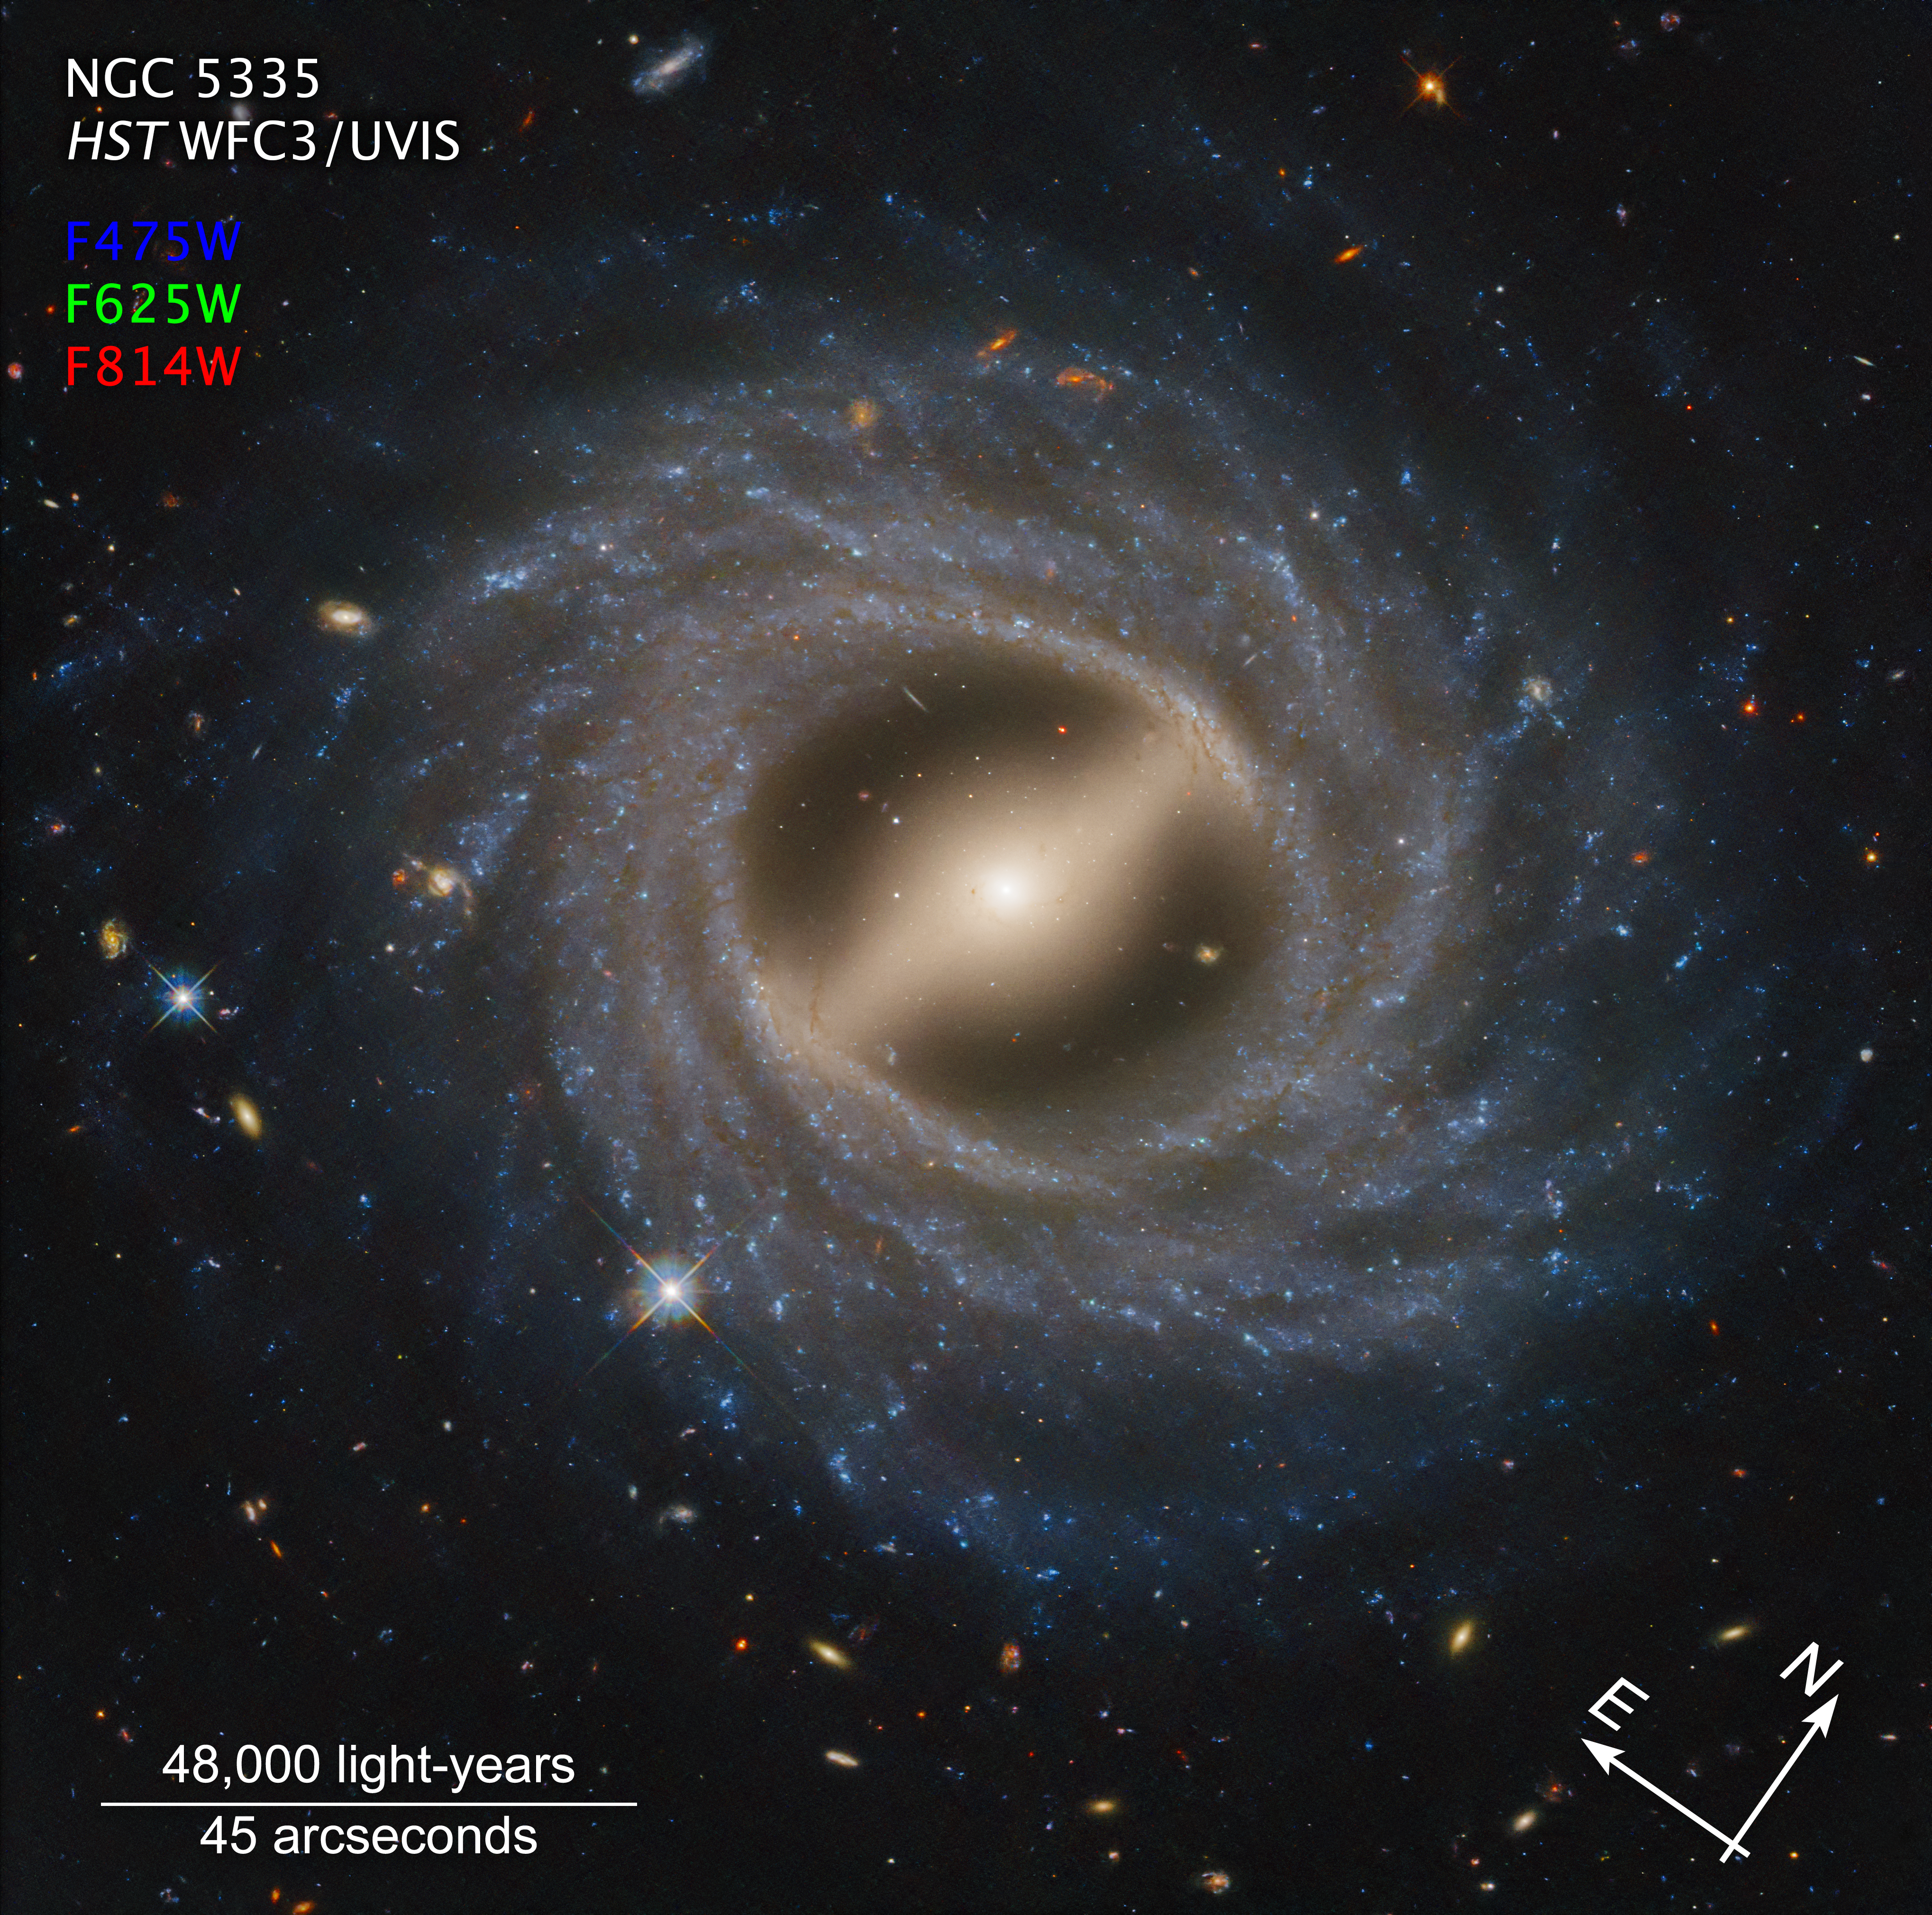

Barred Spiral Galaxy NGC 5335 (annotated)

The Hubble Space Telescope captured in exquisite detail a face-on view of a remarkable-looking galaxy. NGC 5335 is categorized as a flocculent spiral galaxy with patchy streamers of star formation across its disk. There is a striking lack of well-defined spiral arms that are commonly found among galaxies, including our Milky Way. A notable bar structure slices across the center of the galaxy. The bar channels gas inwards toward the galactic center, fueling star formation. Such bars are dynamic in galaxies and may come and go over two-billion-year intervals. They appear in about 30 percent of observed galaxies, including our Milky Way.

Credit: NASA, ESA, STScI